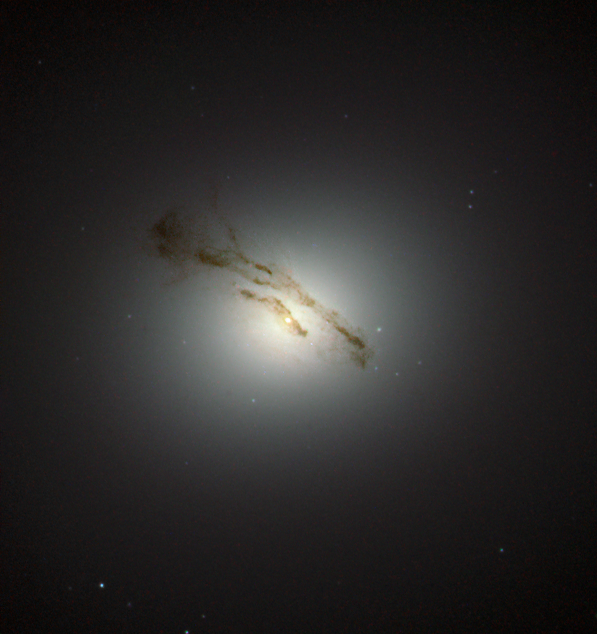

A fascinating core

This NASA/ESA Hubble Space Telescope image captures the galaxy Messier 84 — also known as NGC 4374 — an object from the Messier catalogue, published in its final version in 1781 by Charles Messier.

This elliptical galaxy was discovered in March 1781 and lies about 60 million light-years away from Earth in the constellation of Virgo (The Virgin). The galaxy is part of the very heavily populated centre of the Virgo Cluster, a cluster which consists of more than 1000 galaxies.

This image does not show the whole galaxy but only its very interesting centre, and is likely to be the best image of the region ever captured. Previous observations using Hubble’s Space Telescope Imaging Spectrograph (STIS) revealed a supermassive black hole in the centre of Messier 84. Astronomers found the supermassive black hole by mapping the motion of the gas and the stars which are caught in its grip.

Next to its interesting centre Messier 84 is also known for its supernovae. Two supernovae have been observed within the galaxy. The first, SN1957 was discovered in 1957 and another, called SN1991bg, was discovered in 1991.

Credit: ESA/Hubble & NASA